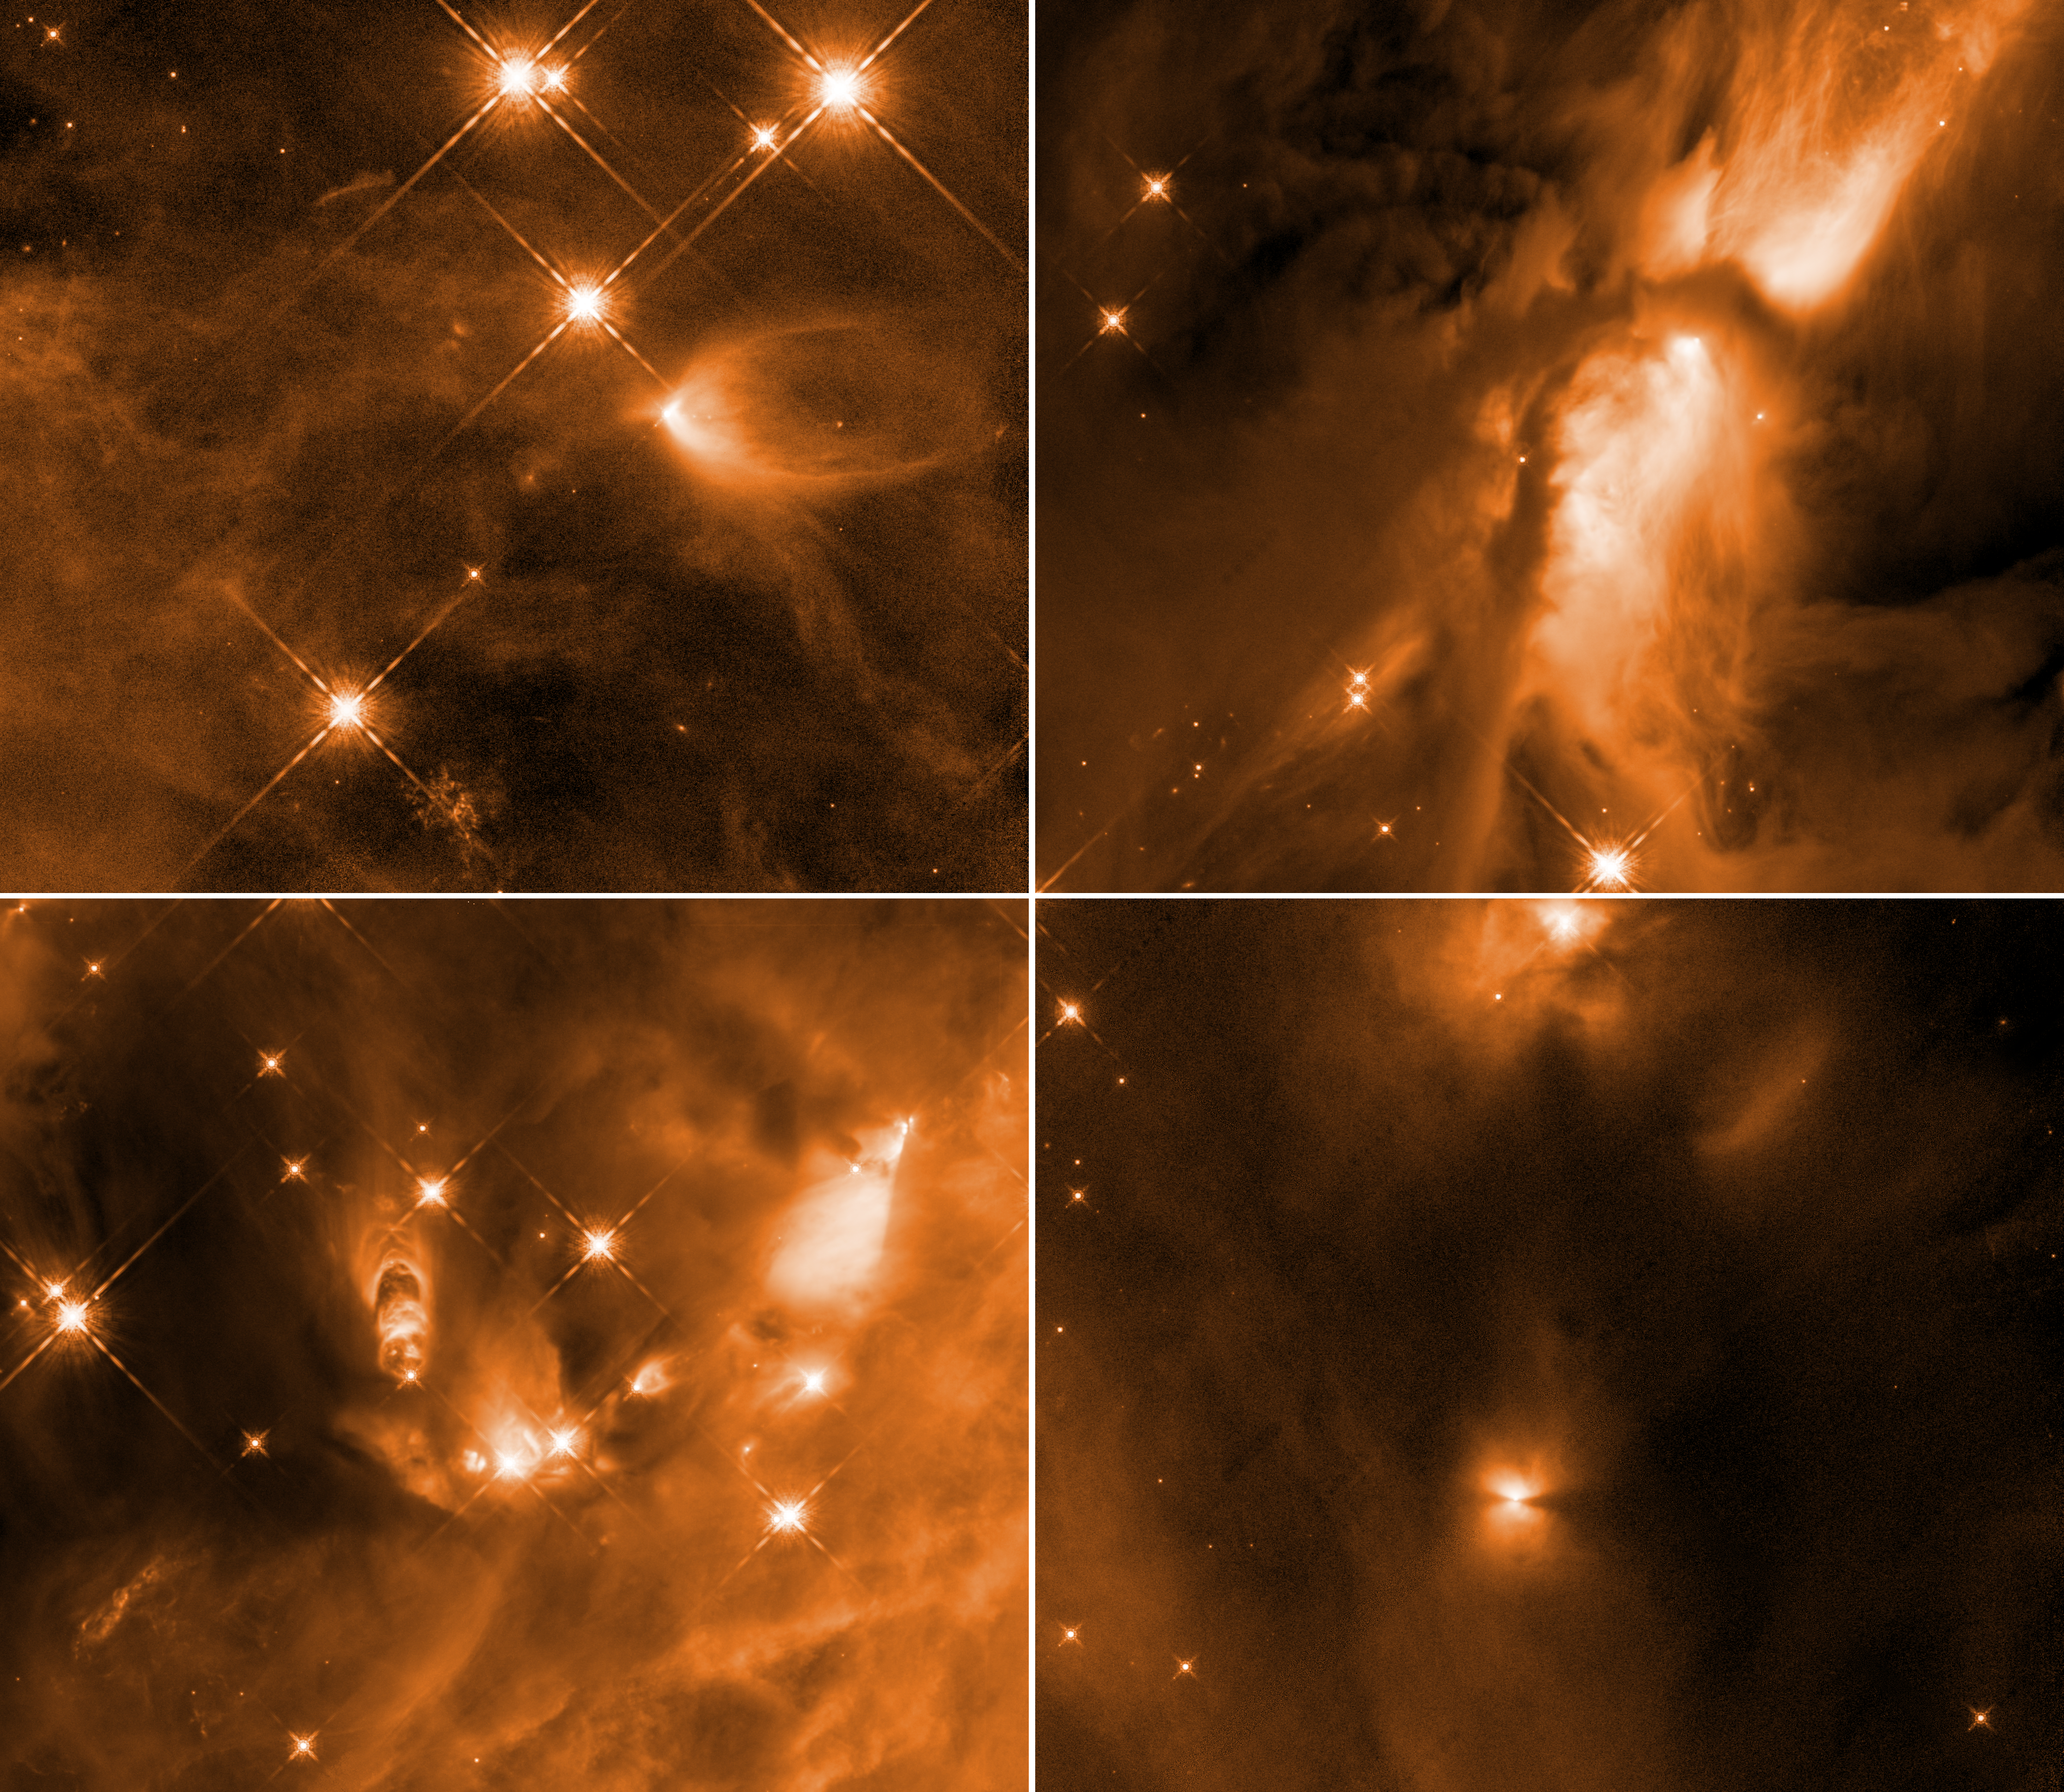

Infant Stars in Orion

These four images taken by the NASA/ESA Hubble Space Telescope reveal the chaotic birth of stars in the Orion complex, the nearest major star-forming region to Earth.

The snapshots show fledgling stars buried in dusty gaseous cocoons announcing their births by unleashing powerful winds, as well as pairs of spinning, lawn-sprinkler-style jets shooting off in opposite directions. Near-infrared light pierces the dusty region to unveil details of the birthing process.

The stellar outflows are carving out cavities within the gas cloud, composed of hydrogen gas. This relatively brief birthing stage lasts about 500,000 years.

Although the stars themselves are shrouded in dust, they emit powerful radiation, which strikes the cavity walls and scatters off dust grains, illuminating in infrared light the gaps in the gaseous envelopes. Astronomers found that the cavities in the surrounding gas cloud sculpted by a forming star’s outflow did not grow regularly as they matured, as theories propose.

The young stars in these images are just a subset of an ambitious study of 304 developing stars, the largest-ever to date. Researchers used data previously collected from Hubble as well as the NASA Spitzer Space Telescope and the European Space Agency's Herschel Space Telescope.

The protostars were photographed in near-infrared light by Hubble's Wide Field Camera 3. The images were taken Nov. 14, 2009, and Jan. 25, Feb. 11, and Aug. 11, 2010.

Credit: NASA, ESA, STScI, N. Habel and S. T. Megeath (University of Toledo)